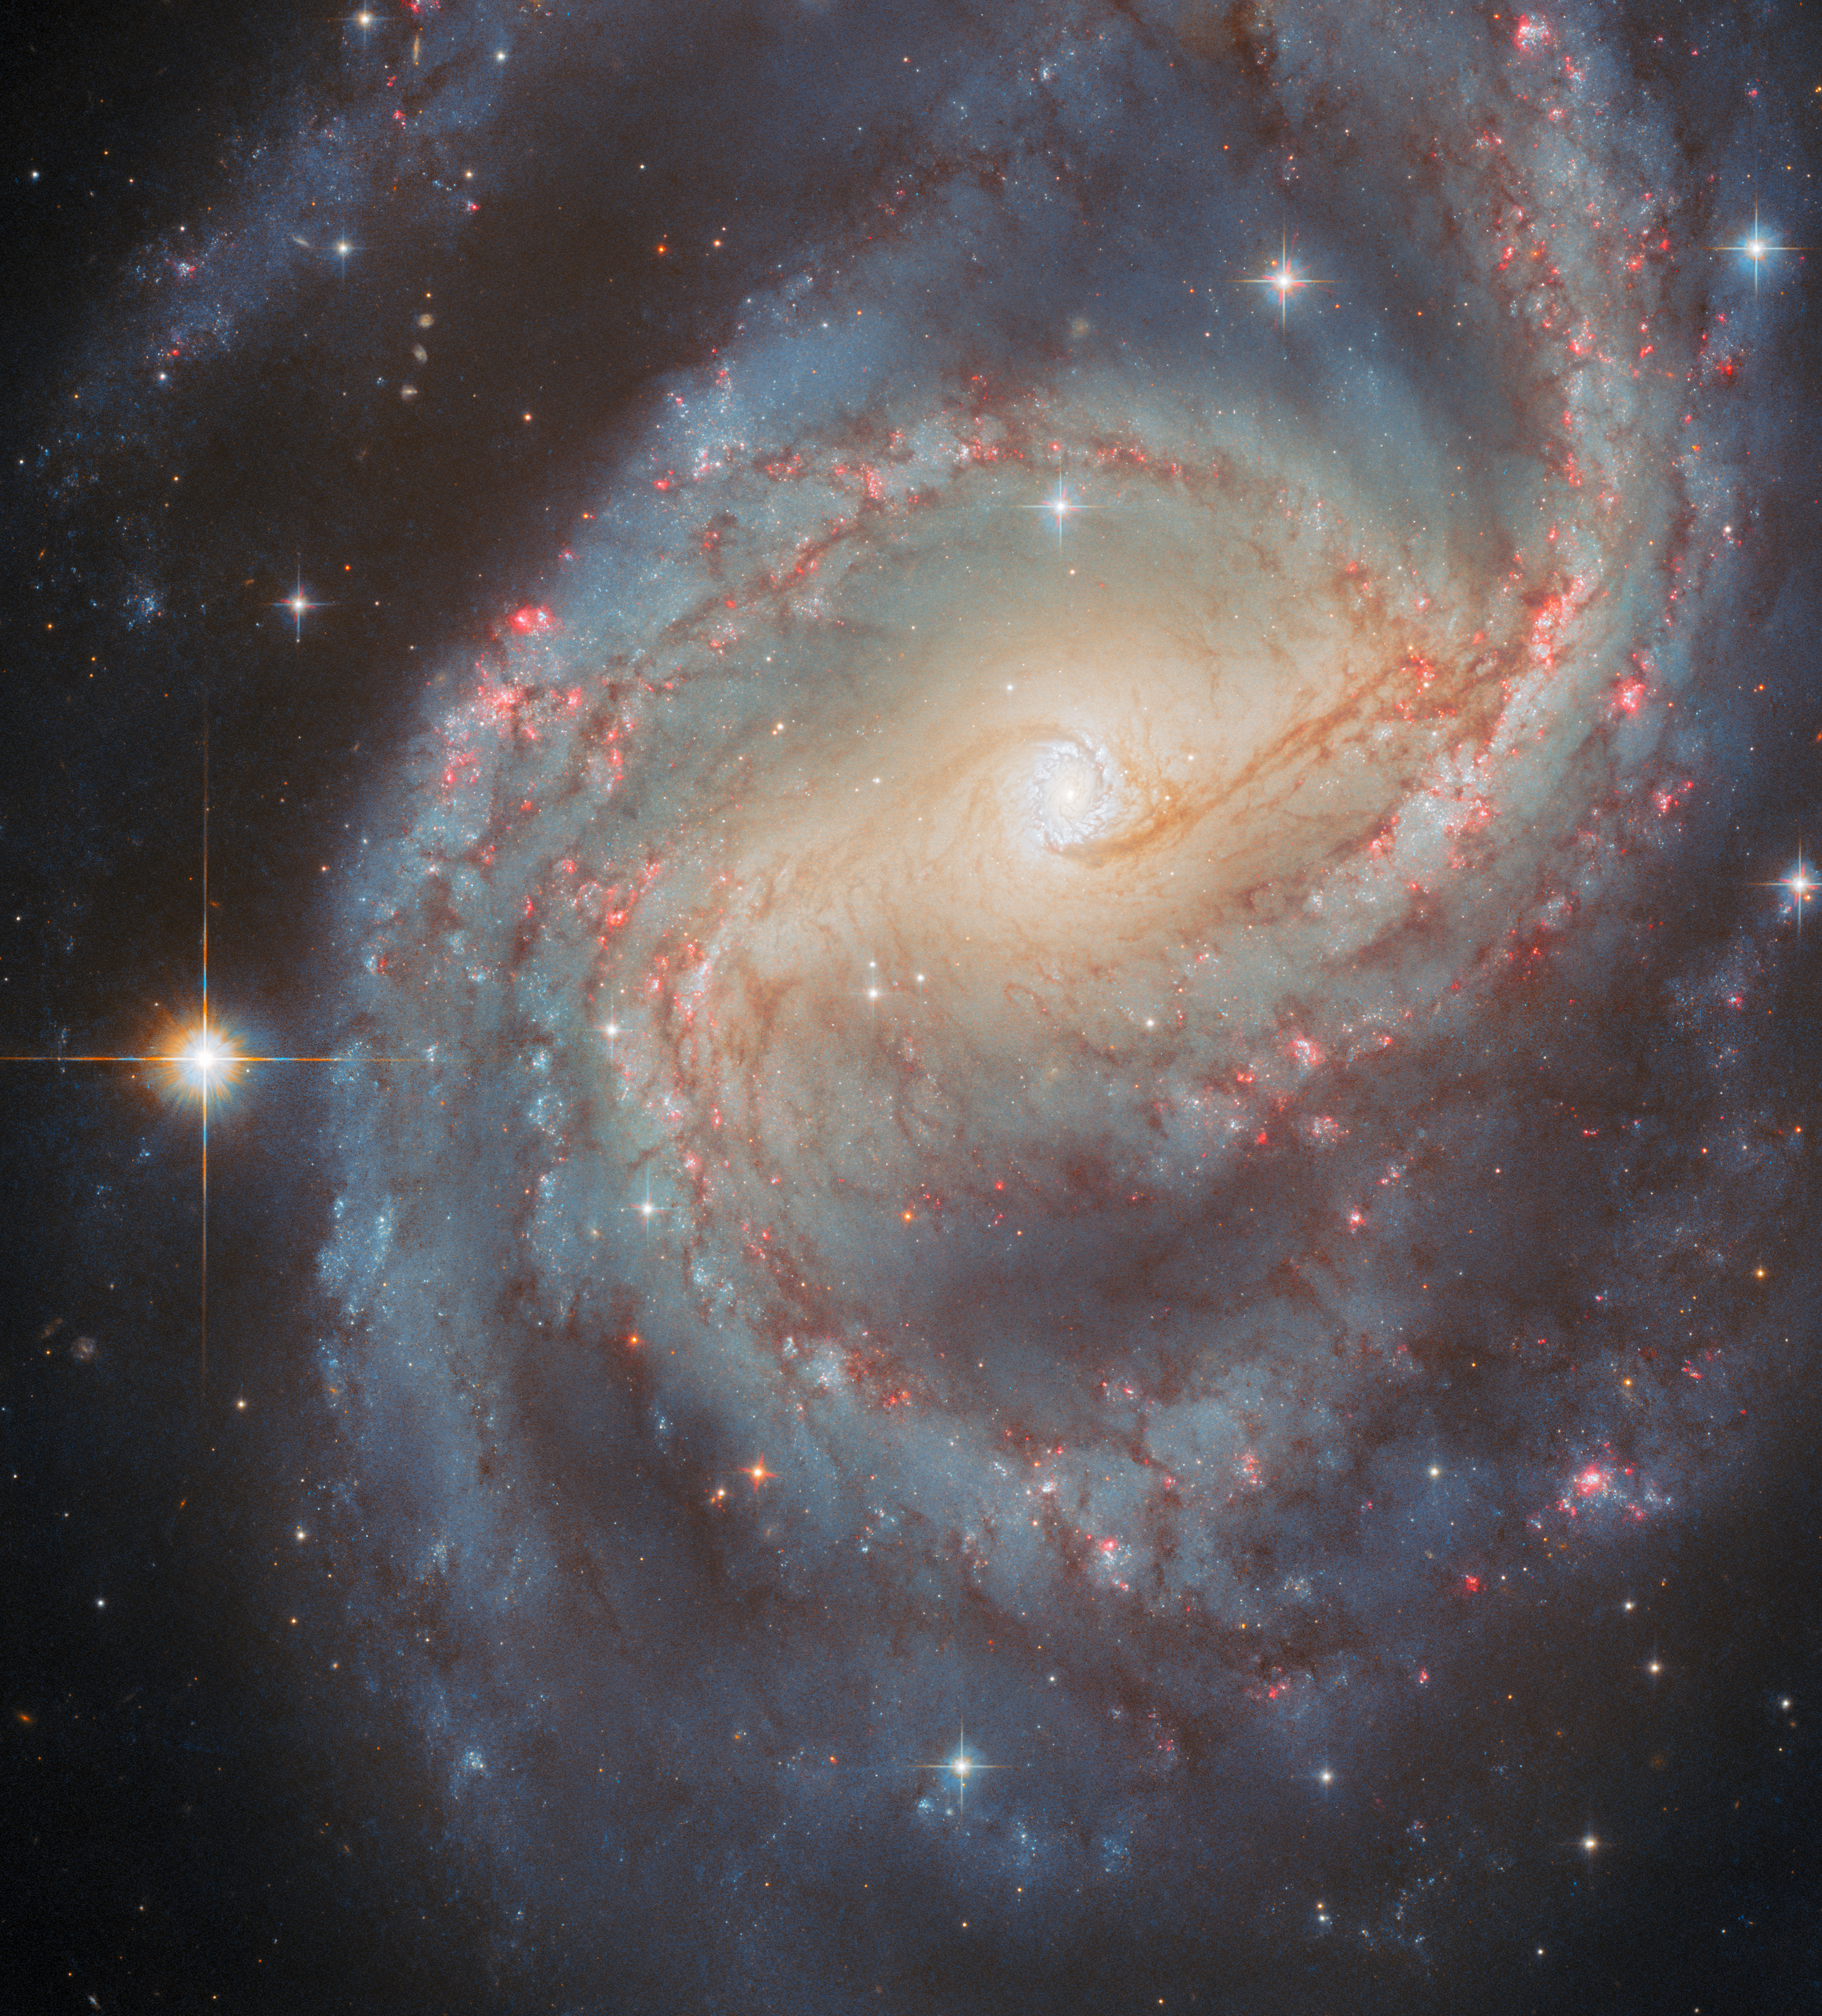

Starbursting centre

The glittering galaxy in this NASA/ESA Hubble Space Telescope Picture of the Week is NGC 6951, which resides about 70 million light-years away in the constellation Cepheus.

As this Hubble image shows, NGC 6951 is a spiral galaxy with plenty of intriguing structures. Most eye-catching are its spiral arms, which are dotted with brilliant red nebulae, bright blue stars and filamentary dust clouds. The spiral arms loop around the galactic centre, which has a golden glow that comes from a population of older stars. The centre of the galaxy is also distinctly elongated, revealing the presence of a slowly rotating bar of stars.

NGC 6951’s bar may be responsible for another remarkable feature: a white-blue ring that encloses the very heart of the galaxy. This is called a circumnuclear starburst ring — essentially, a circle of enhanced star formation around the nucleus of a galaxy. The bar funnels gas toward the centre of the galaxy, where it collects in a ring about 3800 light-years across. Two dark dust lanes that run parallel to the bar mark the points where gas from the bar enters the ring.

The dense gas of a circumnuclear starburst ring is the perfect environment to churn out an impressive number of stars. Using data from Hubble, astronomers have identified more than 80 potential star clusters within NGC 6951’s ring. Many of the stars formed less than 100 million years ago, but the ring itself is longer-lived, potentially having existed for 1–1.5 billion years.

Astronomers have imaged NGC 6951 with Hubble for a wide variety of reasons, including mapping the dust in nearby galaxies, studying the centres of disc galaxies and keeping tabs on recent supernovae (of which NGC 6951 has hosted five or six).

Credit: ESA/Hubble & NASA, L. C. Ho, G. Brammer, A. Filippenko, C. Kilpatrick